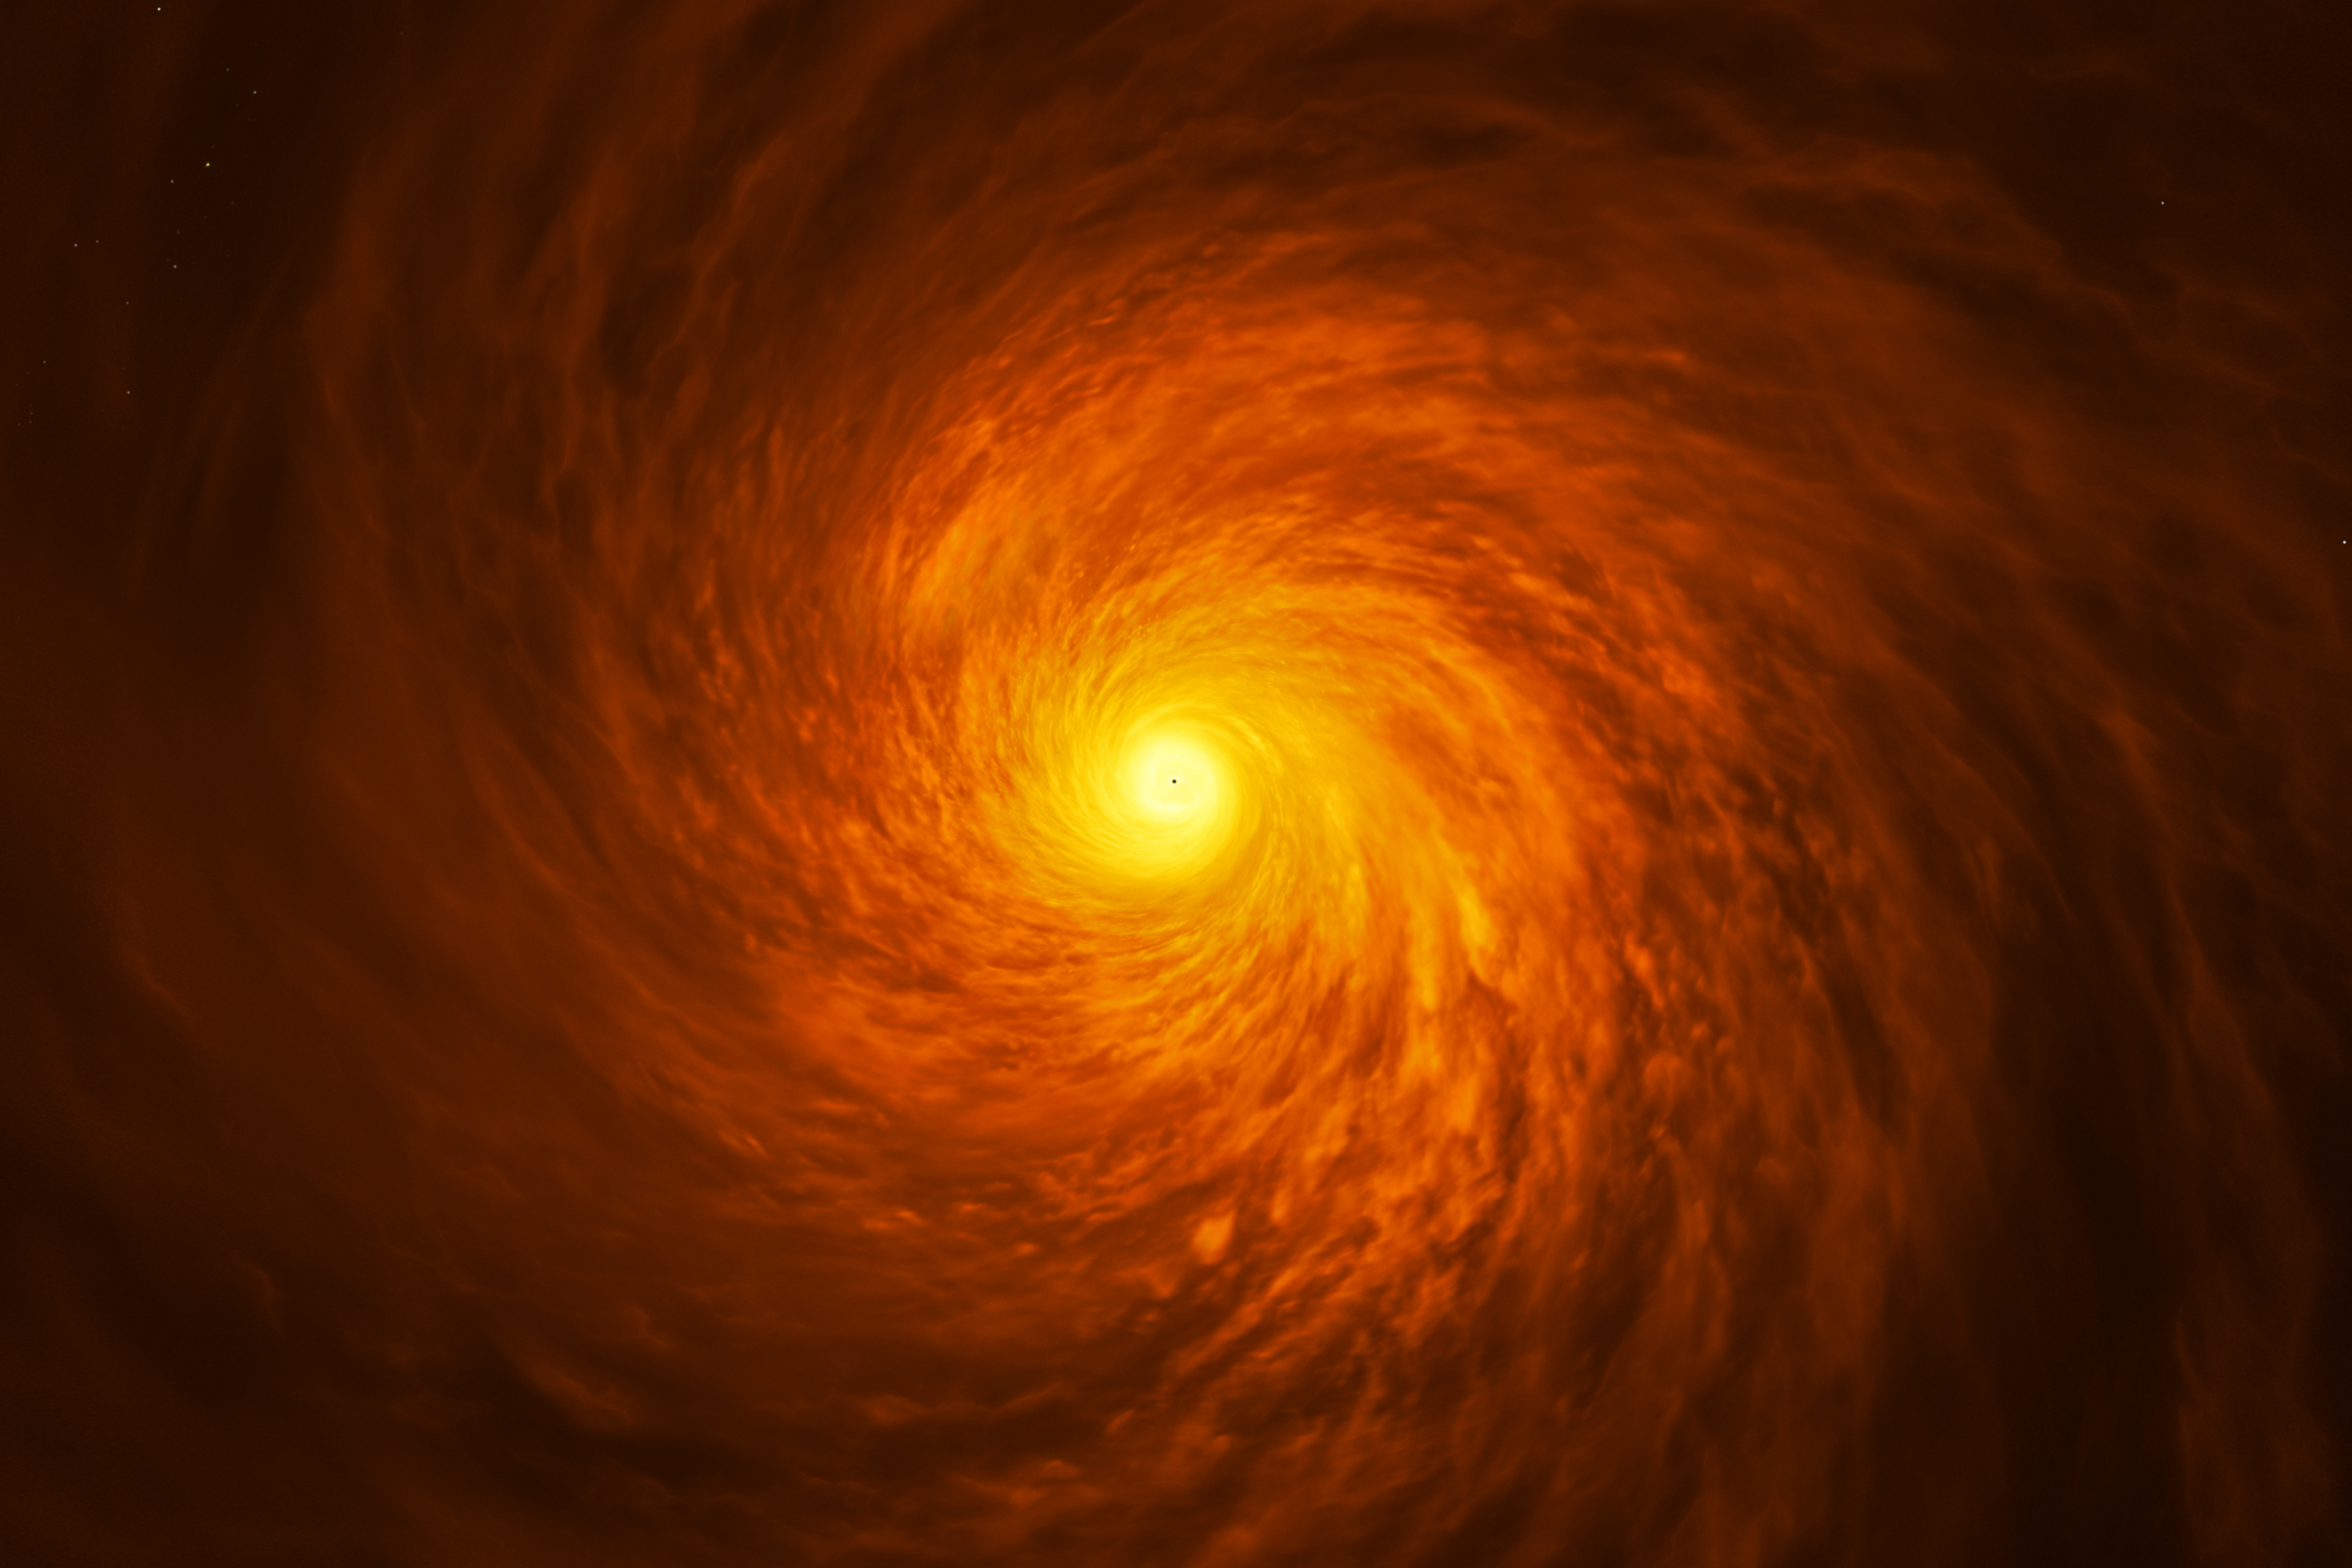

Top-Down view of artist’s impression of NGC3147 black hole disc

Top-down view of an artist’s impression of the peculiar thin disc of material circling a supermassive black hole at the heart of the spiral galaxy NGC 3147, located 130 million light-years away.

Credit: ESA/Hubble, M. Kornmesser